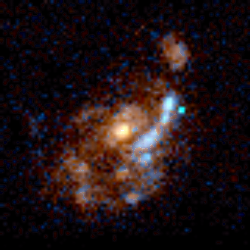

Medium deep survey galaxy

Image of a normal spiral galaxy taken by the Wide Field Planetary Camera 2 (WFPC2) installed on the Hubble Space Telescope (HST). The object is seen face-on and is estimated to be at a distance of 5 to 7 billion light-years from Earth.

Credit: Richard Griffiths (JHU) and NASA